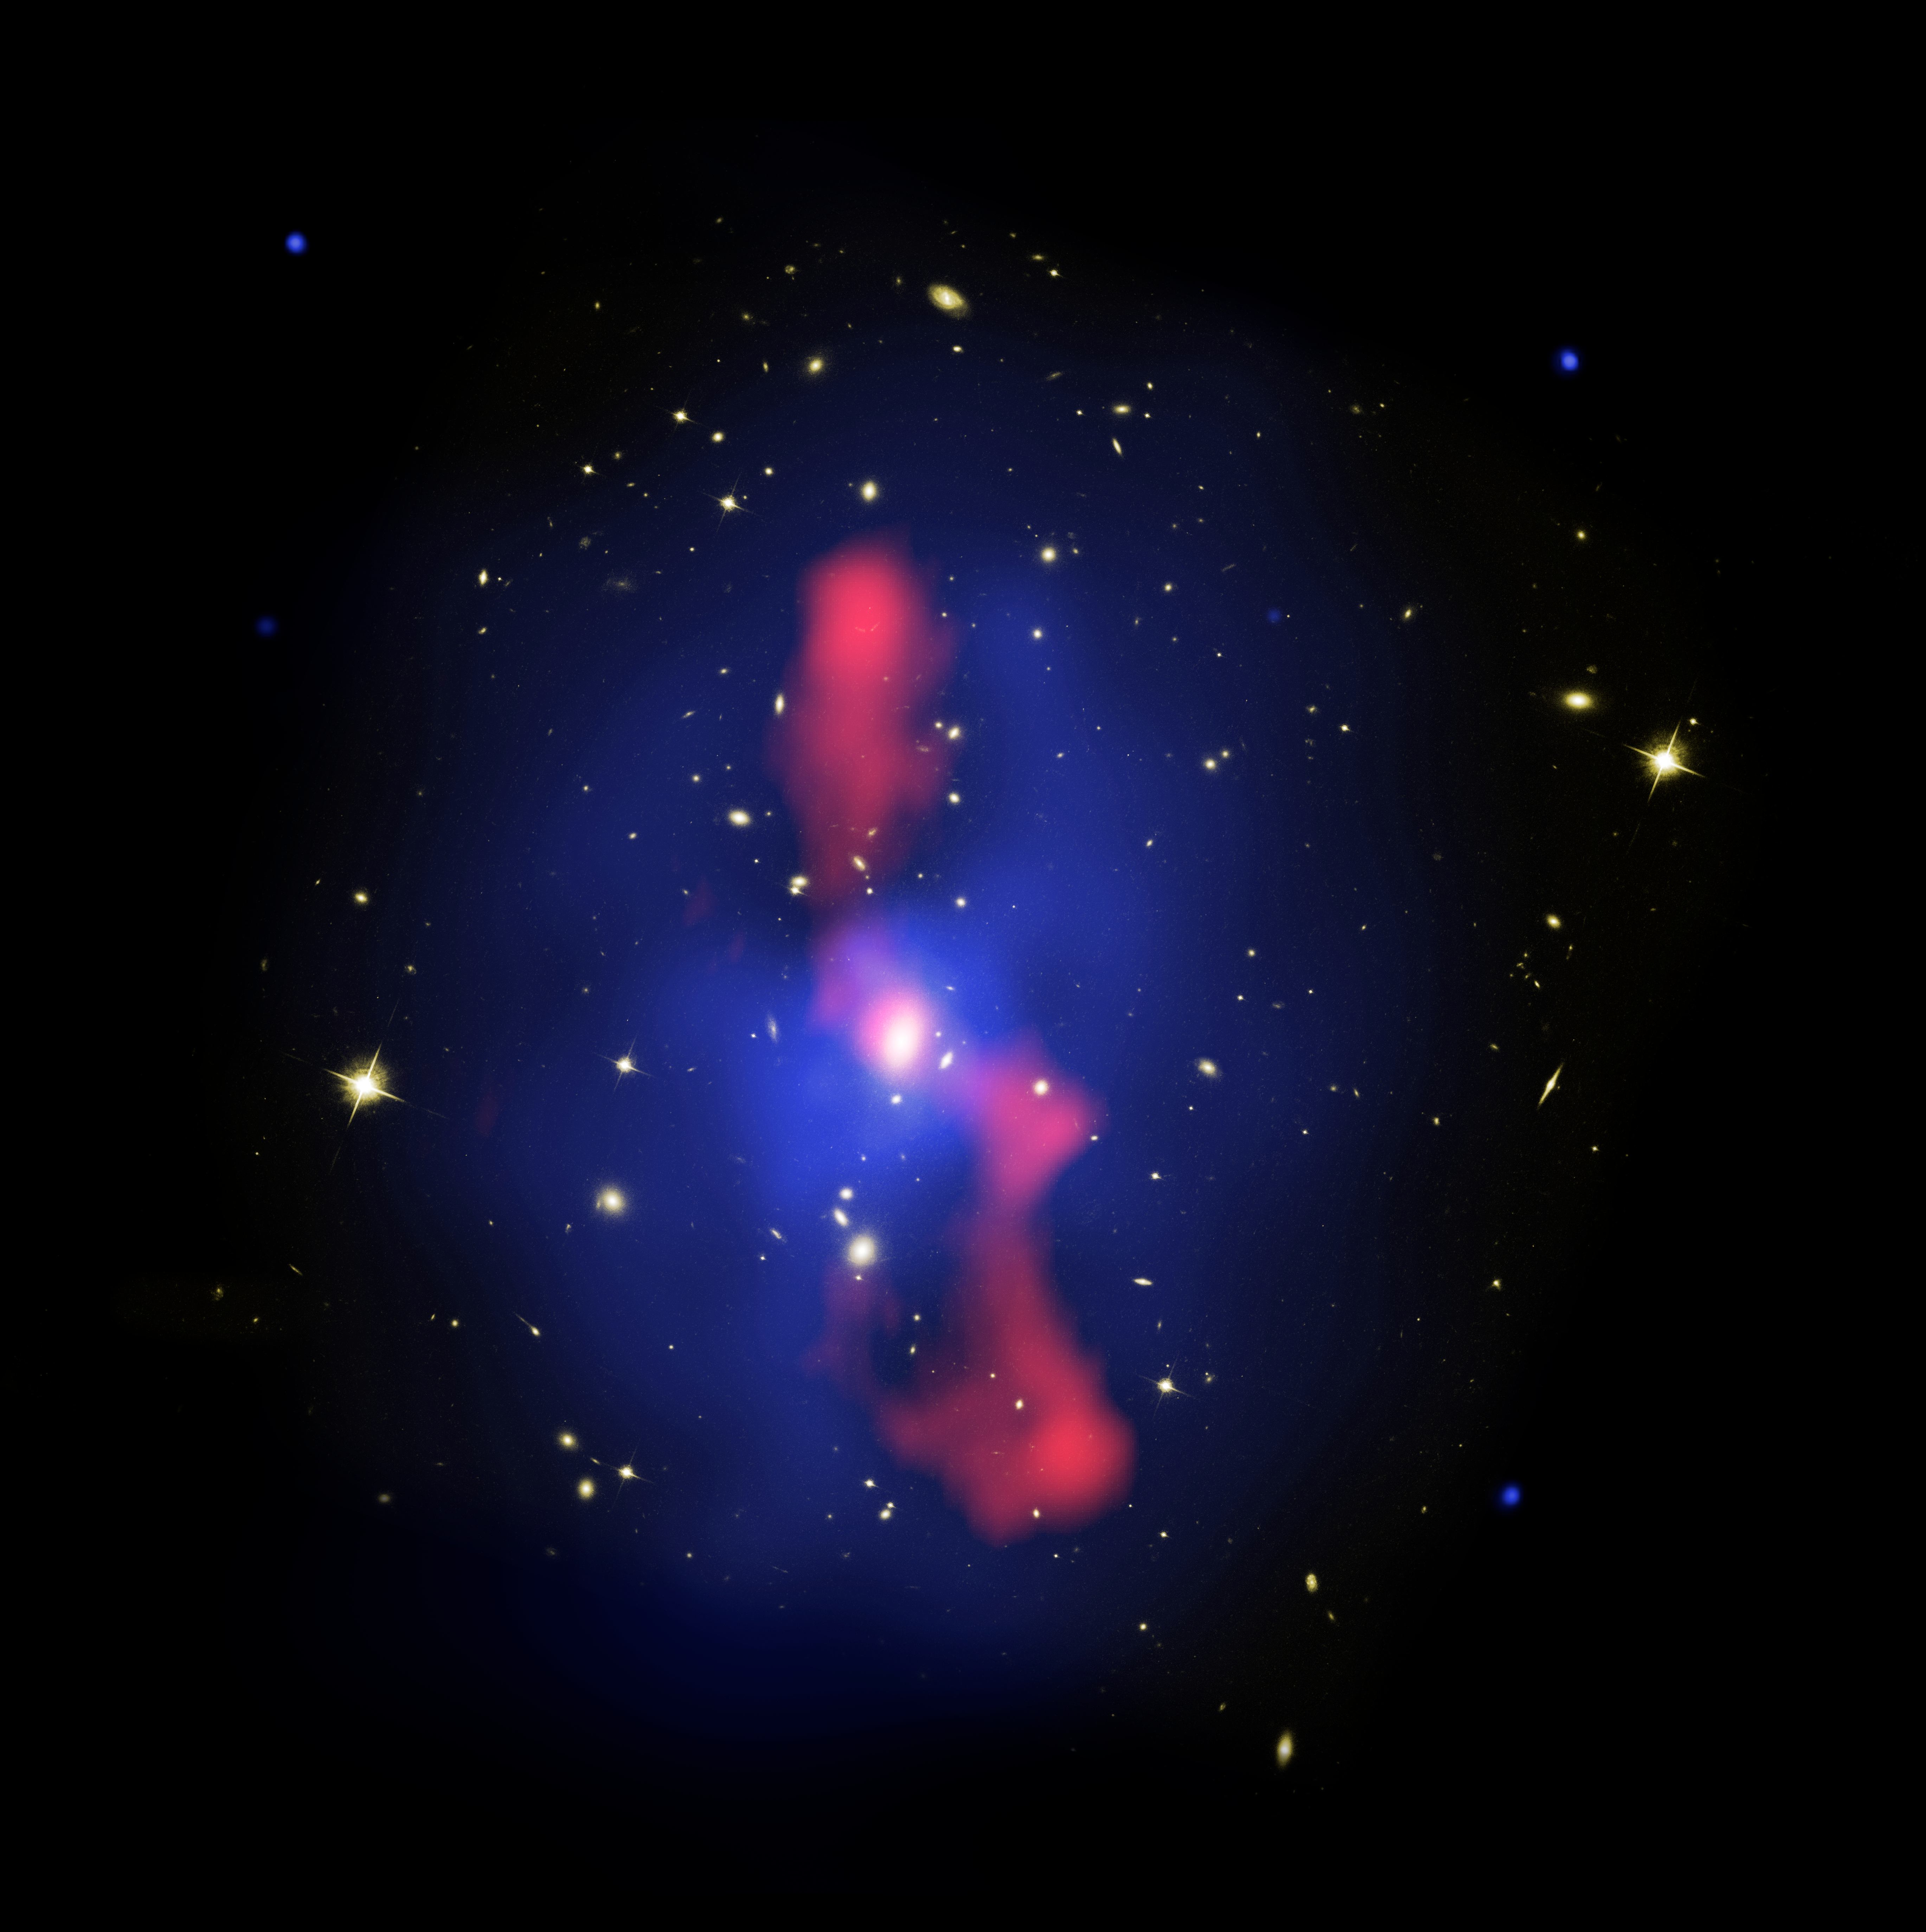

Composite Image of Galaxy Cluster MS 0735

This is a new composite image of galaxy cluster MS0735.6+7421, located about 2.6 billion light-years away in the constellation Camelopardalis. The three views of the region were taken with NASA's Hubble Space Telescope in Feb. 2006, NASA's Chandra X-ray Observatory in Nov. 2003, and NRAO's Very Large Array in Oct. 2004.

Credit: Hubble and Chandra: NASA, ESA, CXC, STScI, and B. McNamara (University of Waterloo)
Very Large Array Telescope Image Credit: NRAO, and L. Birzan and team (Ohio University)